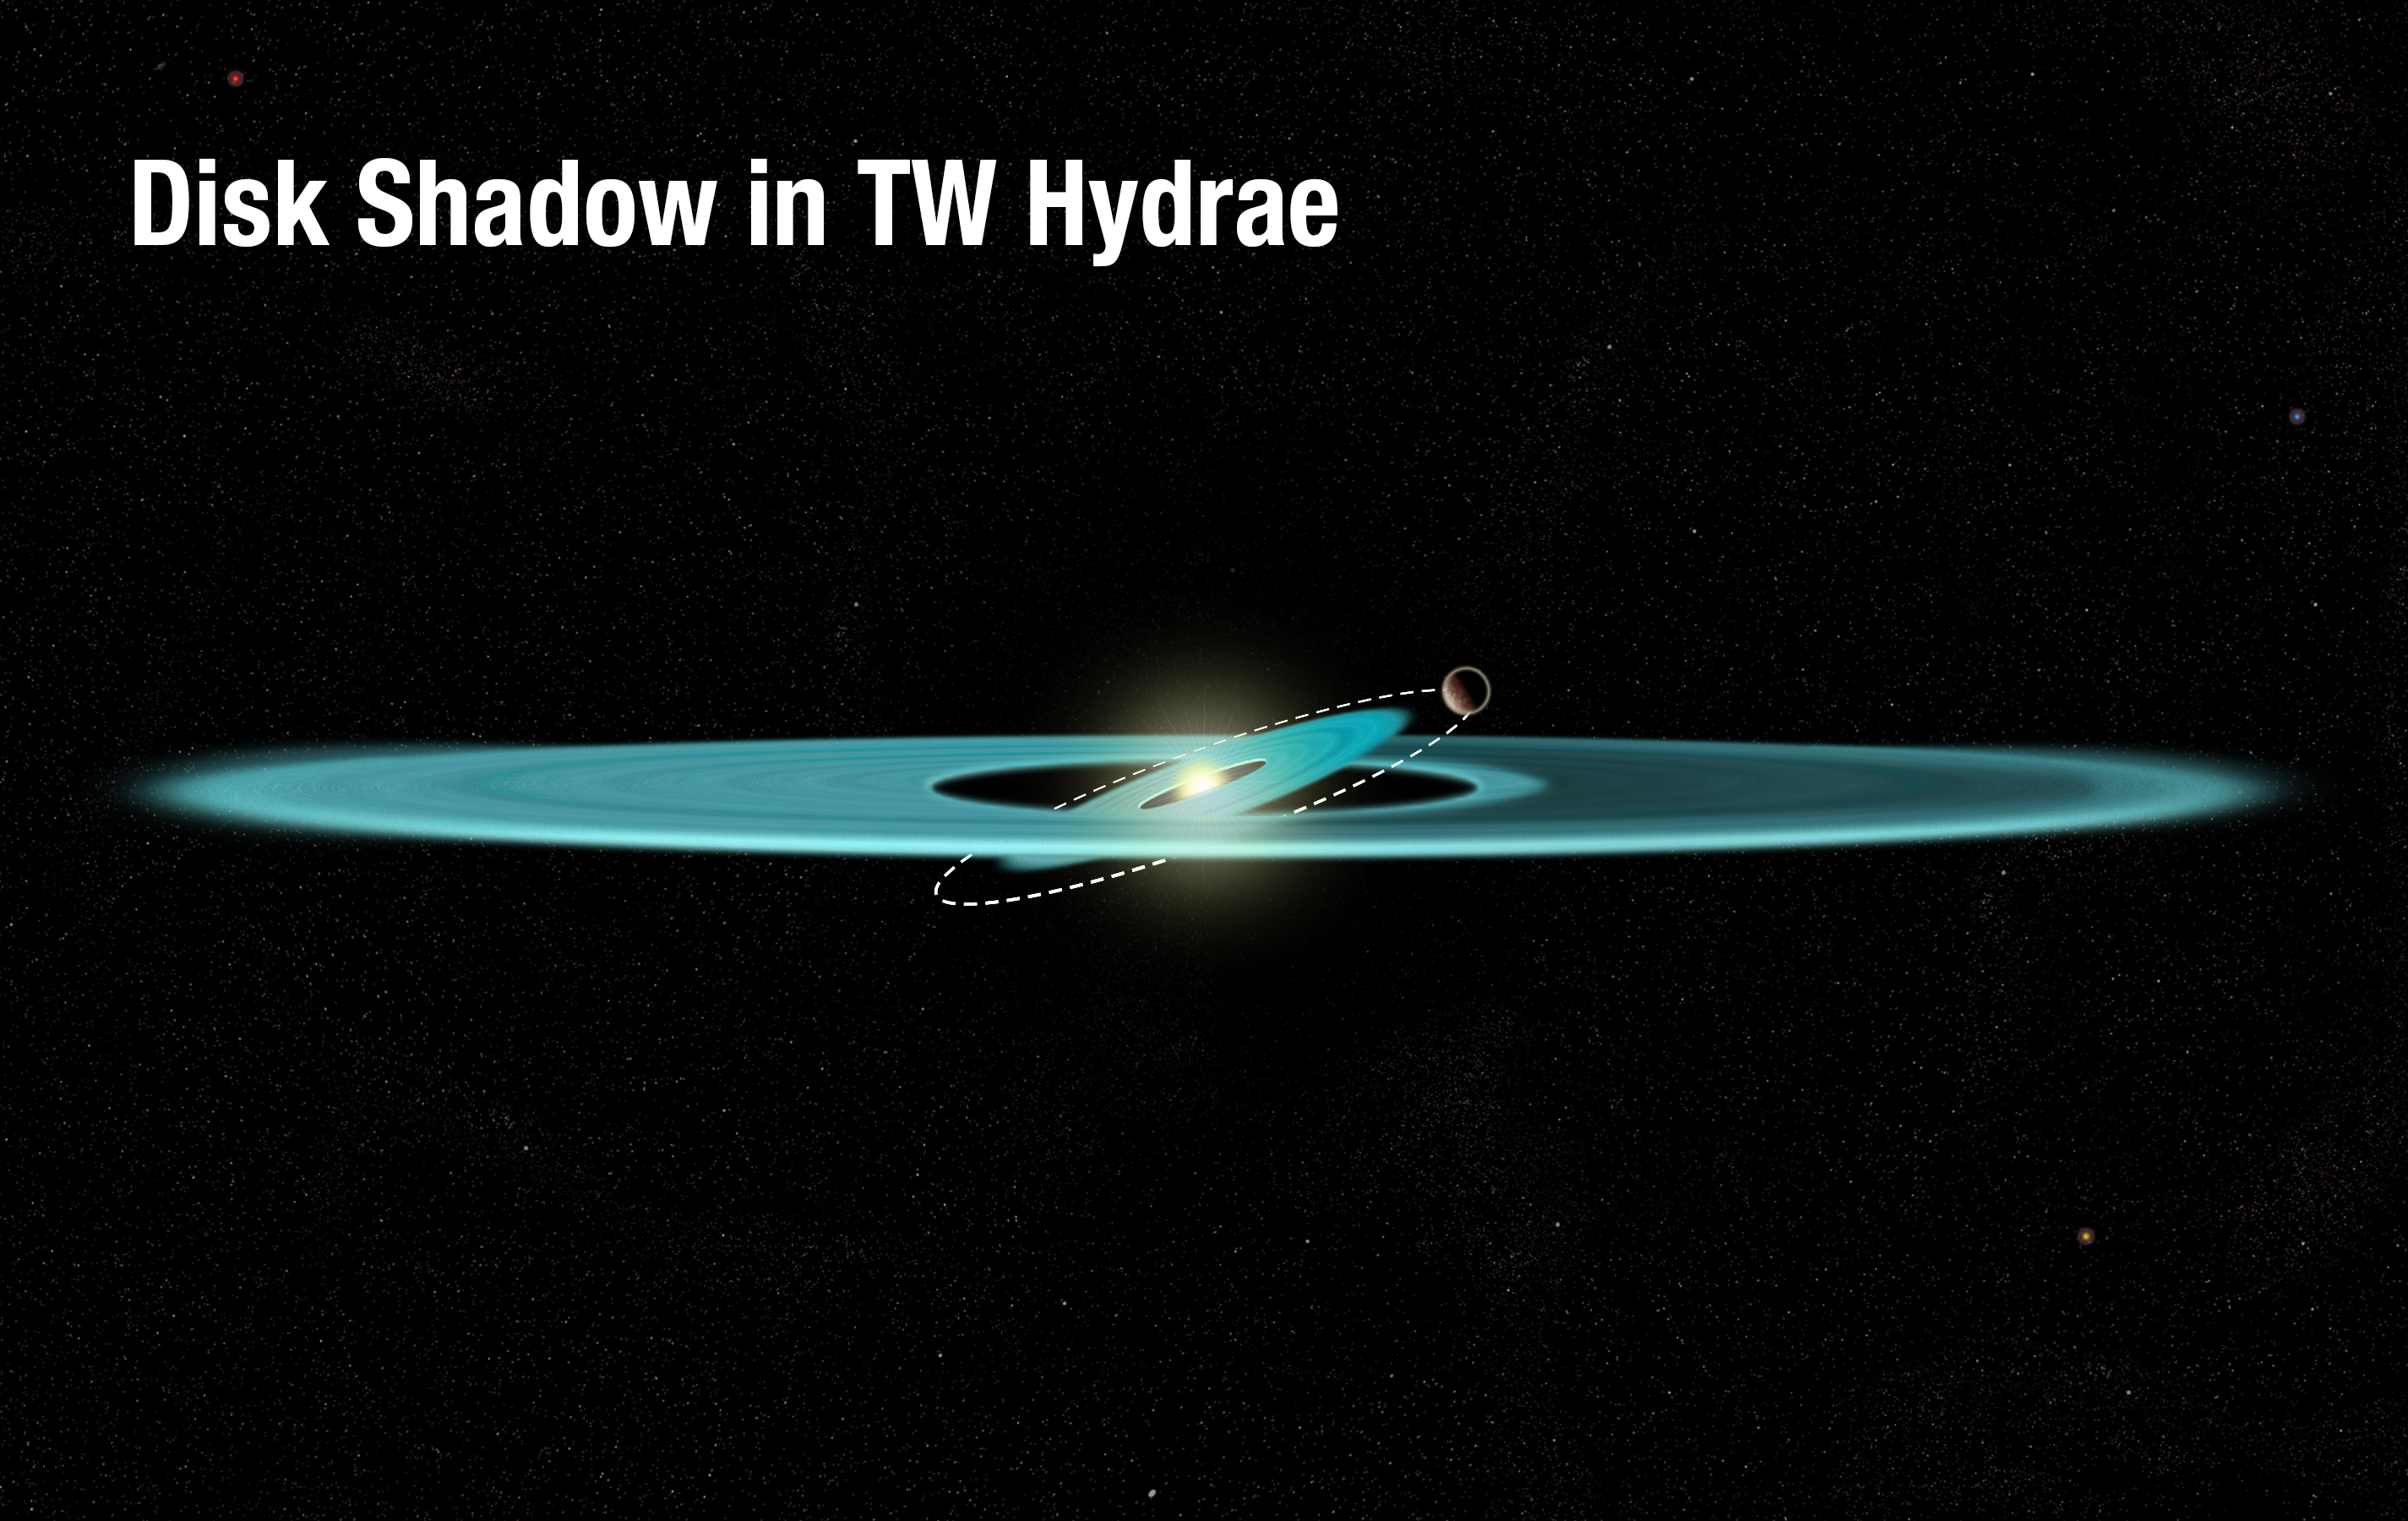

The making of a shadow in TW Hydrae's disc (illustration)

This illustration reveals the proposed structure of the gas and dust disc surrounding the nearby, young star TW Hydrae. It shows an inner disc that is tilted due to the gravitational influence of an unseen companion, which is orbiting just outside the disc.

The tilted inner disc is the best explanation for a shadow covering part of the disc's outer region. The warped disc is blocking light from the star and casting the shadow across the disc. The nature of the darkening was first revealed in Hubble Space Telescope archival observations, which showed that the feature moved around the star at a much faster rate than any phenomenon that would be physically linked to the slowly rotating disc.

TW Hydrae is about 8 million years old and resides about 190 light-years from Earth.

Credit: NASA, ESA, and A. Feild (STScI)